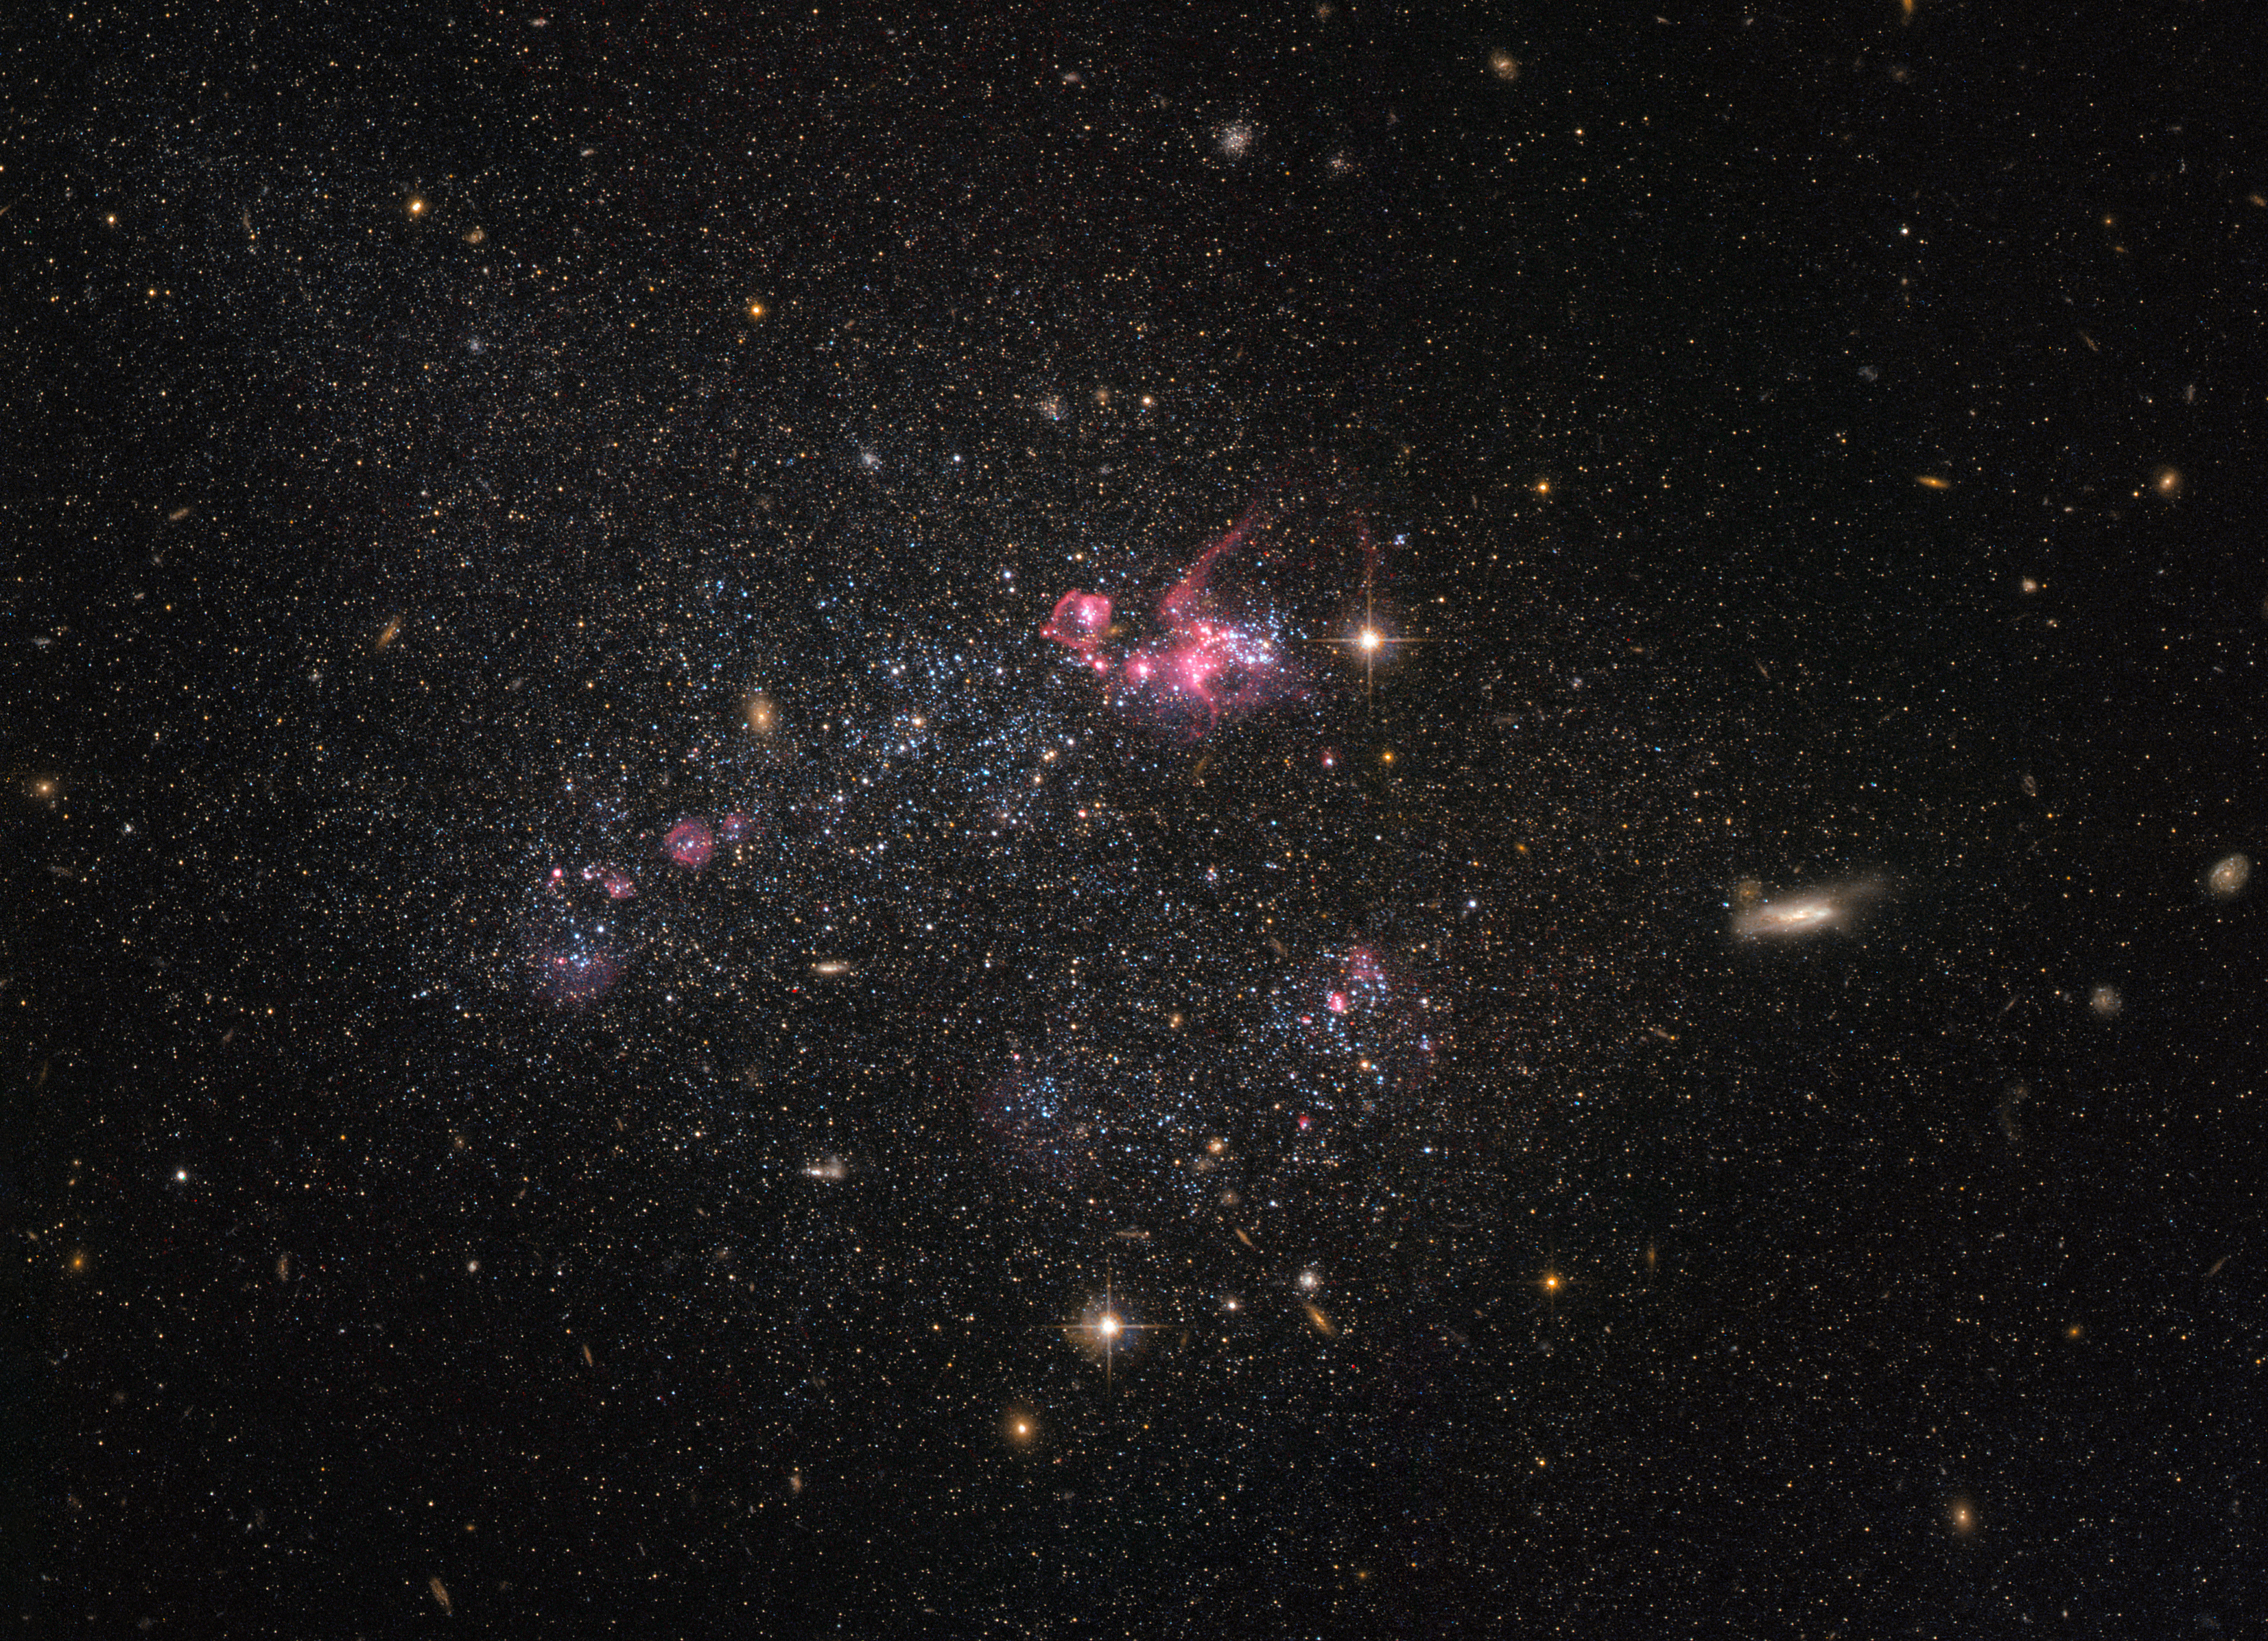

A distinctly disorganised dwarf

Despite being less famous than their elliptical and spiral galactic cousins, irregular dwarf galaxies, such as the one captured in this NASA/ESA Hubble Space Telescope image, are actually one of the most common types of galaxy in the Universe. Known as UGC 4459, this dwarf galaxy is located approximately 11 million light-years away in the constellation of Ursa Major (The Great Bear), a constellation that is also home to the Pinwheel Galaxy (M101), the Owl Nebula (M97), Messier 81, Messier 82 and several other galaxies all part of the M81 group.

UGC 4459’s diffused and disorganised appearance is characteristic of an irregular dwarf galaxy. Lacking a distinctive structure or shape, irregular dwarf galaxies are often chaotic in appearance, with neither a nuclear bulge — a huge, tightly packed central group of stars — nor any trace of spiral arms — regions of stars extending from the centre of the galaxy. Astronomers suspect that some irregular dwarf galaxies were once spiral or elliptical galaxies, but were later deformed by the gravitational pull of nearby objects.

Rich with young blue stars and older red stars, UGC 4459 has a stellar population of several billion. Though seemingly impressive, this is small when compared to the 200 to 400 billion stars in the Milky Way!

Observations with Hubble have shown that because of their low masses, star formation is very low compared to larger galaxies. Only very little of their original gas has been turned into stars. Thus, these small galaxies are interesting to study to better understand primordial environments and the star formation process.

Credit: ESA/Hubble & NASA Acknowledgement: Judy Schmidt (Geckzilla)